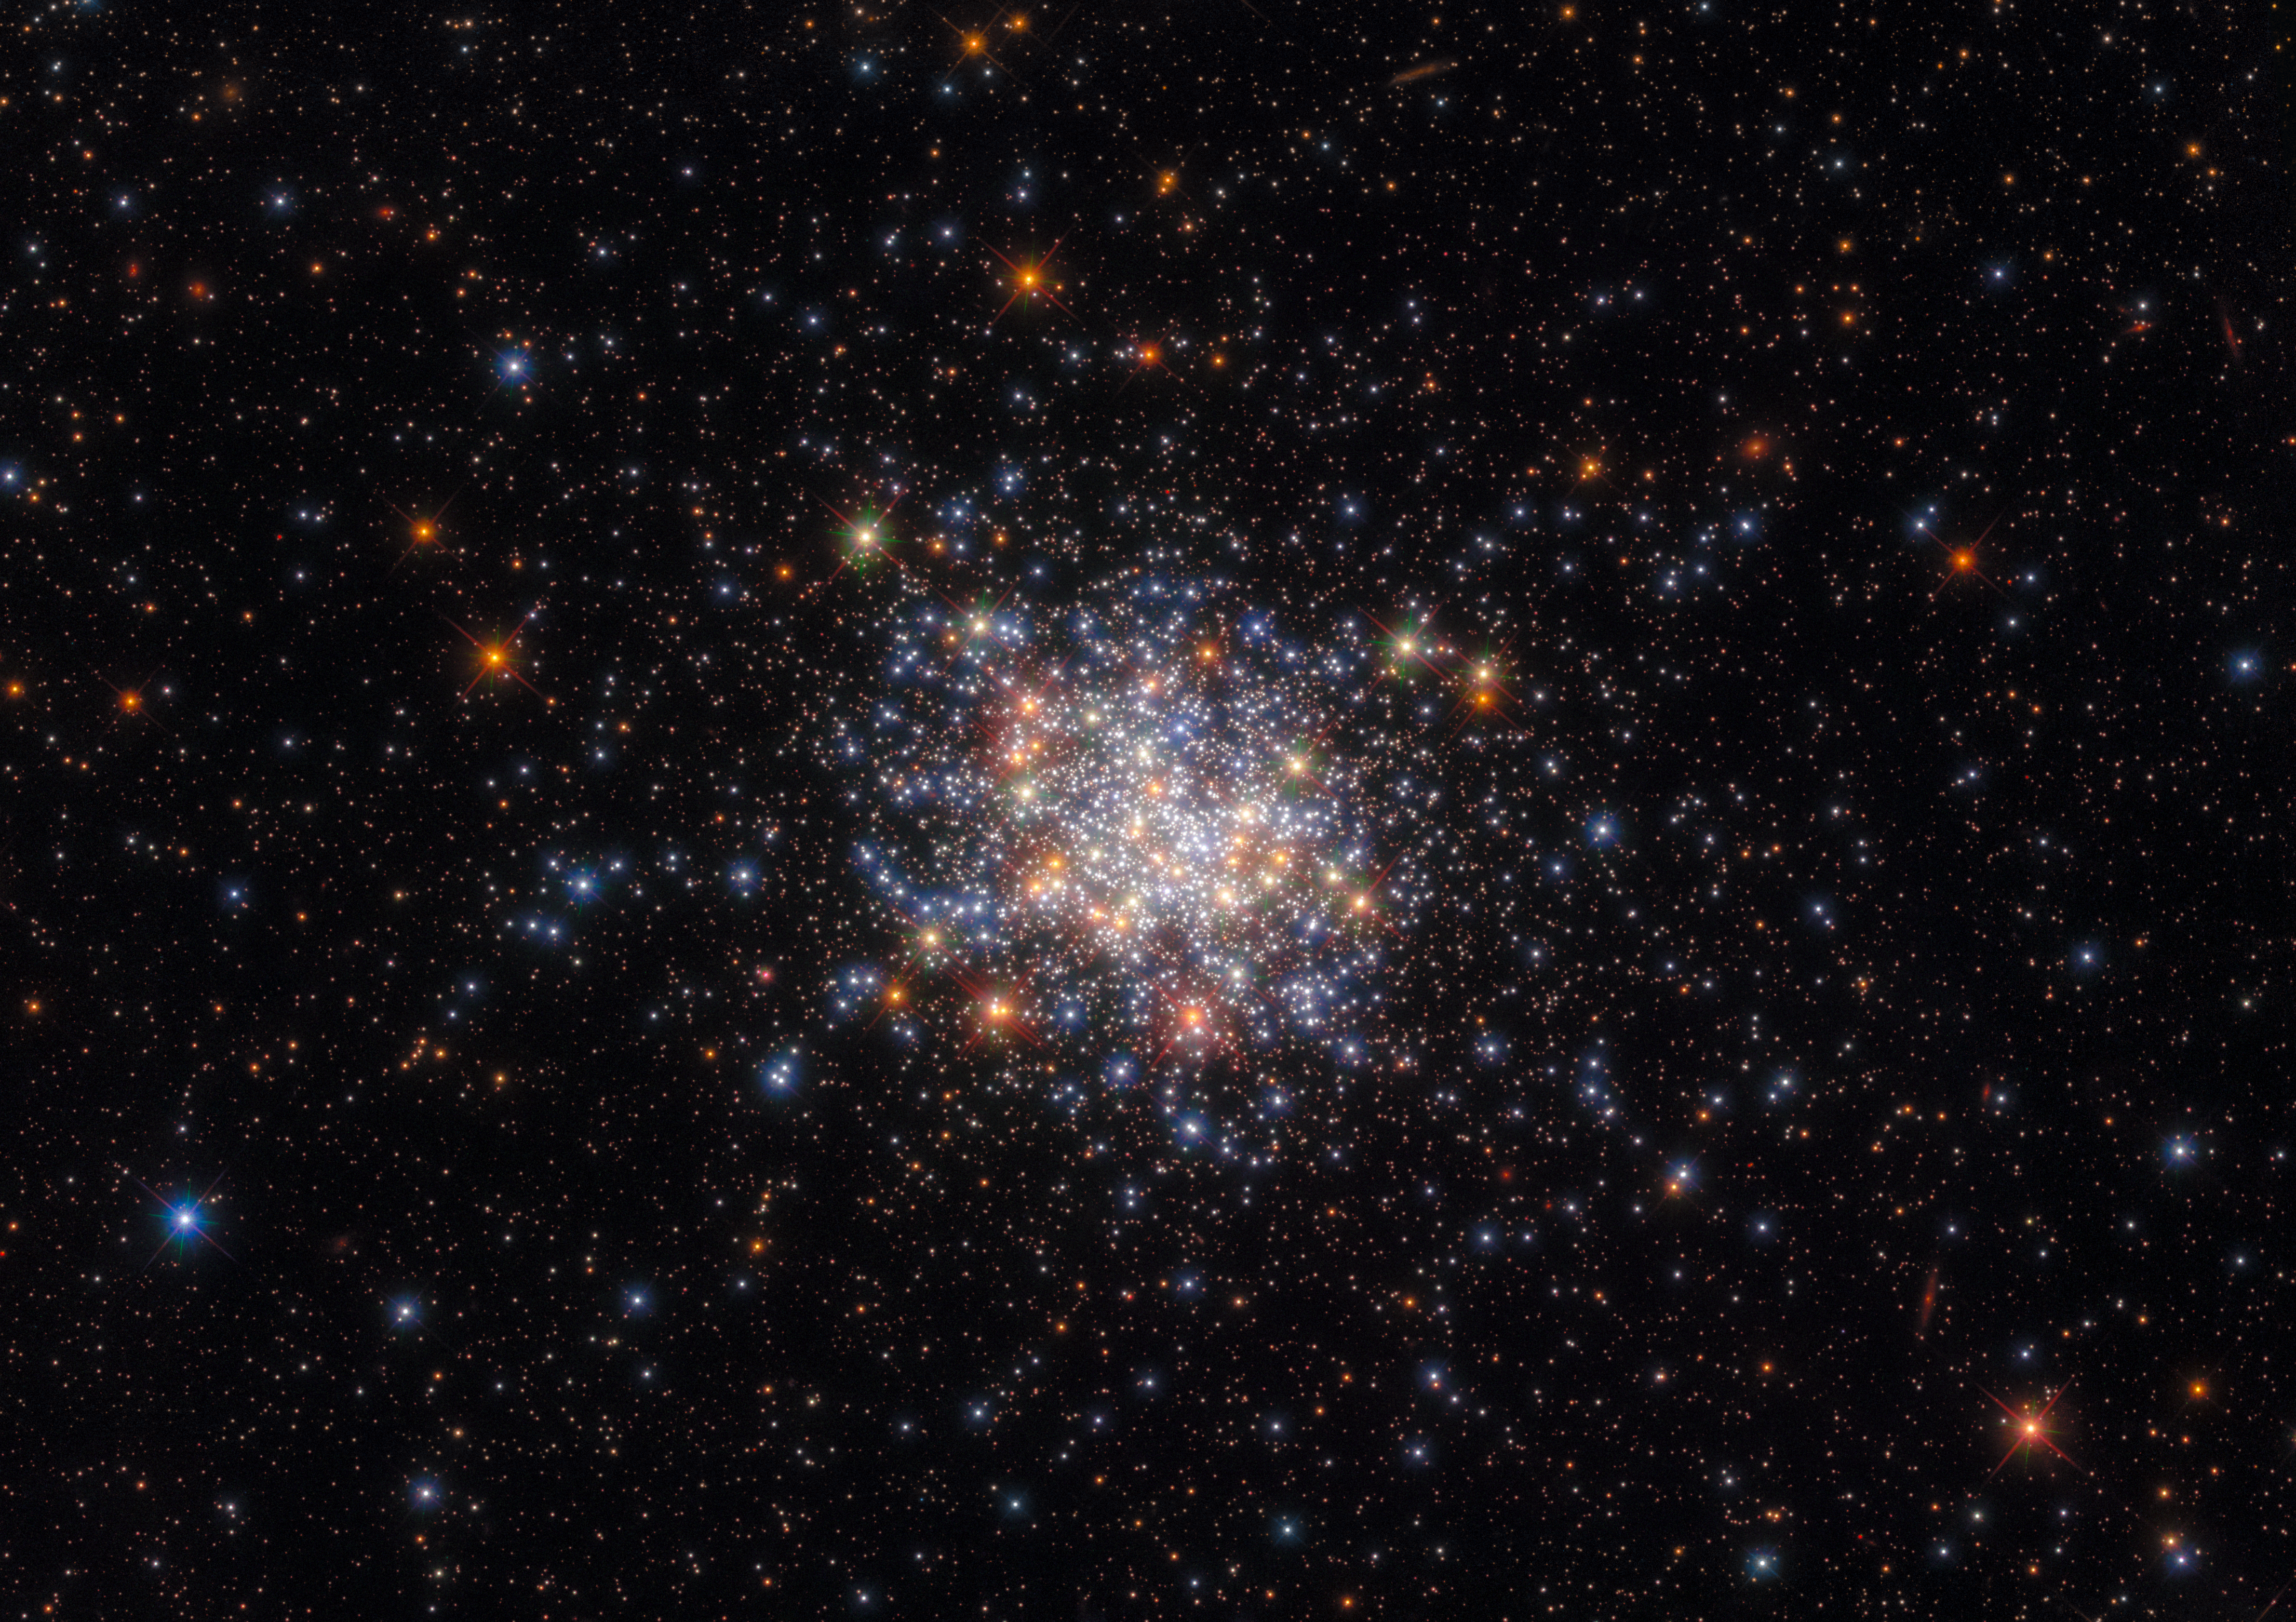

A Sprinkling of Stars

The open star cluster NGC 1755 resembles a pinch of salt strewn on a jet-black tablecloth in this image from the NASA/ESA Hubble Space Telescope. This collection of stars resides in one the Milky Way’s near neighbours — the Large Magellanic Cloud — and measures 120 light-years from side to side. Despite this impressive breadth, NGC 1755 is a member of the smaller class of star clusters. Star clusters are gravitationally bound collections of stars, and come in two main varieties — smaller open clusters like NGC 1755, which are hosts to younger stars, and gargantuan globular clusters, which can contain millions of older stars.

Hubble gazed into the heart of NGC 1755 in order to better understand how different populations of stars can co-exist in a single cluster. A population of stars is a group of stars with similar properties such as age or chemical composition, and these populations provide astronomers with valuable insights into the births, lives, and deaths of stars. Clusters in the Magellanic Clouds are particularly useful natural laboratories thanks to the Clouds’ proximity to the Milky Way. Hubbles’s eagle-eyed vision was a vital asset when observing NGC 1755 — with so many stars packed into a small area of sky, Hubble’s high-resolution Advanced Camera for Surveys and Wide Field Camera 3 allowed individual stars in the cluster to be distinguished.

Credit: ESA/Hubble & NASA, A. Milone, G. Gilmore